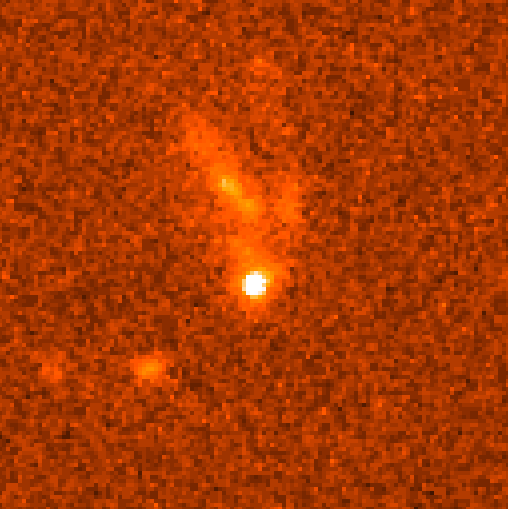

Gamma Ray Burst GRB990123

A NASA/ESA Hubble Space Telescope view of the rapidly fading visible-light fireball from the most powerful cosmic explosion recorded to date. For a brief moment the light from the blast was equal to the radiance of 100 million billion stars. The initial explosion began as an intense burst of gamma-rays which happened on Jan. 23, 1999.

The blast had already faded to one four-millionth of its original brightness when Hubble made observations on February 8 and 9. Space Telescope captured the fading fireball embedded in a galaxy located 2/3 of the way to the horizon of the observable universe.

Credit: Andrew Fruchter (STScI) and NASA/ESA